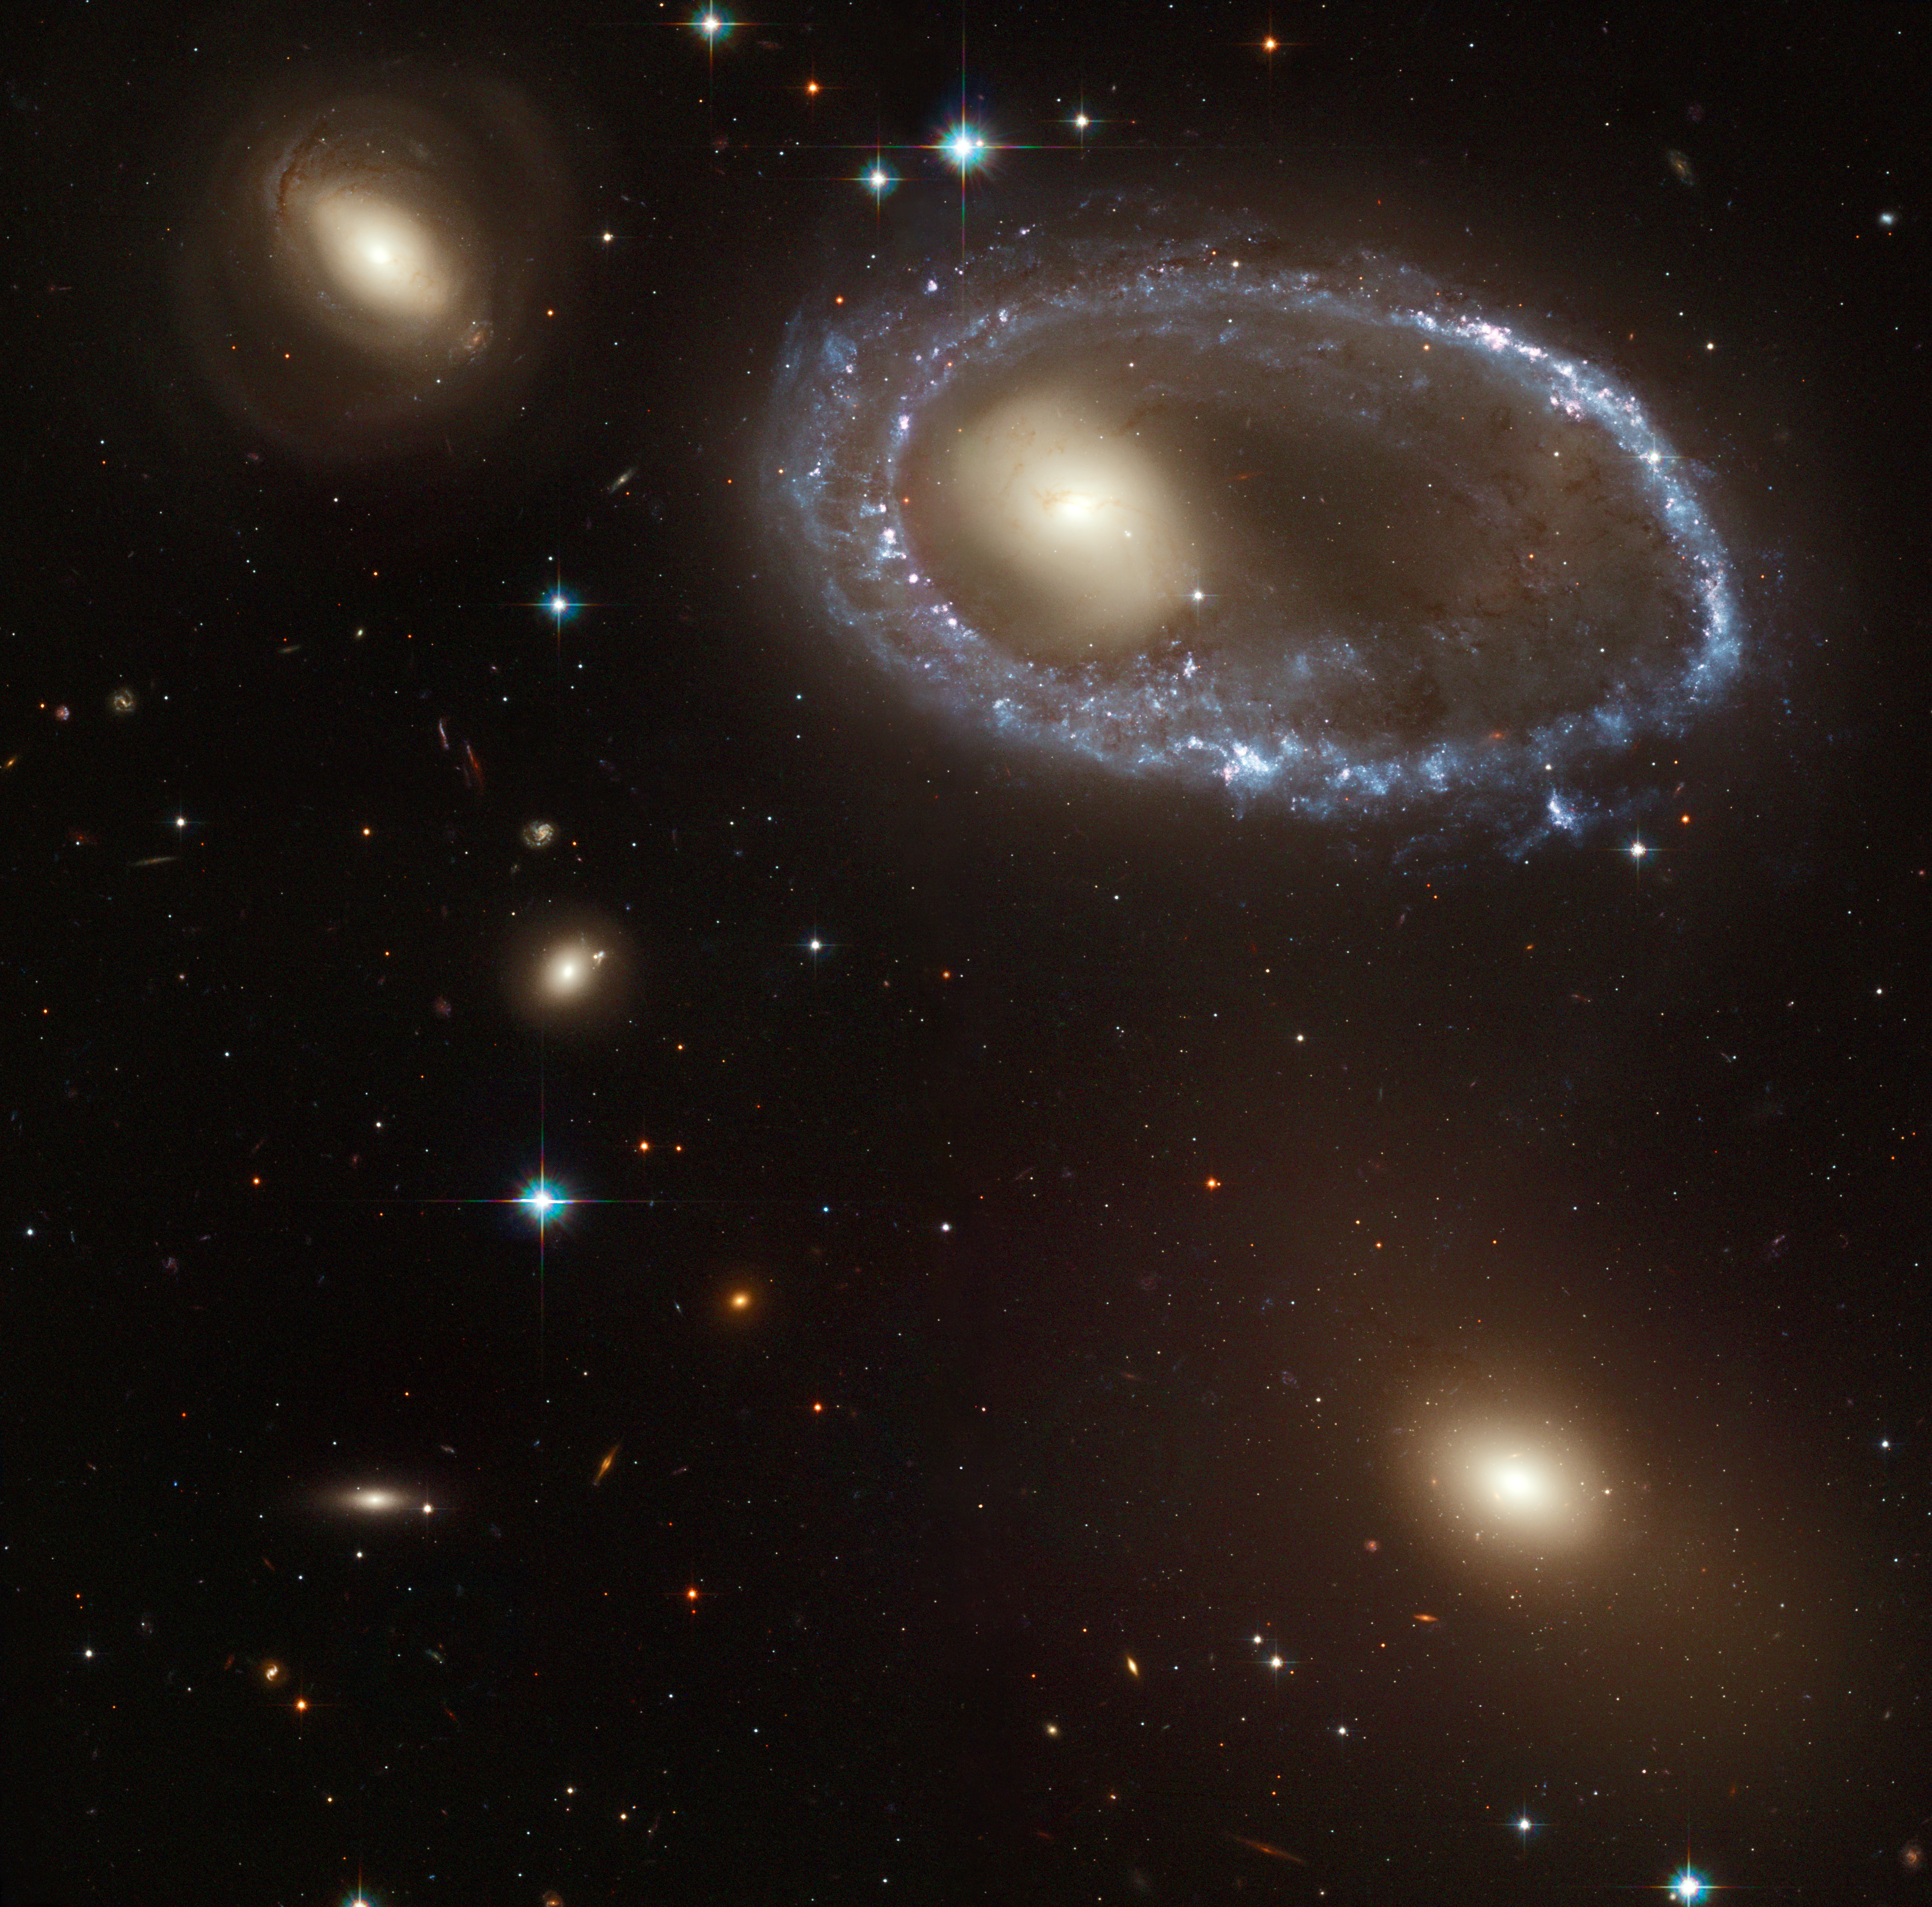

Full HST ACS Image of AM 0644-741

Resembling a diamond-encrusted bracelet, a ring of brilliant blue star clusters wraps around the yellowish nucleus of what was once a normal spiral galaxy in this new image from the NASA/ESAHubble Space Telescope (HST). This image is being released to commemorate the 14th anniversary of Hubble's launch on April 24, 1990 and its deployment from the space shuttle Discovery on April 25, 1990.

The sparkling blue ring is 150,000 light-years in diameter, making it larger than our entire home galaxy, the Milky Way. The galaxy, cataloged as AM 0644-741, is a member of the class of so- called "ring galaxies." It lies 300 million light-years away in the direction of the southern constellation Dorado.

Credit: NASA, ESA, and The Hubble Heritage Team (AURA/STScI)